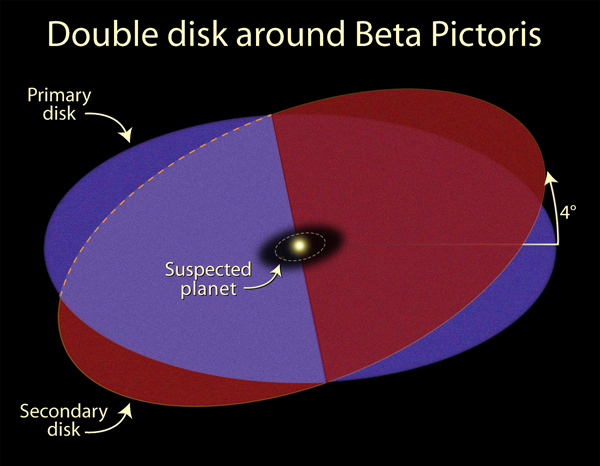

Beta Pictoris - intersecting disks schematic

Detailed images of the nearby star Beta Pictoris, taken by NASA/ESA Hubble Space Telescope, confirm the existence of not one but two dust disks encircling the star. The images offer tantalizing new evidence for at least one Jupiter-size planet orbiting Beta Pictoris.

The finding ends a decade of scientific speculation that an odd warp in the young star's debris disk may actually be another inclined disk. The recent Hubble Advanced Camera for Surveys view - the best visible-light image of Beta Pictoris - clearly shows a distinct secondary disk that is tilted by about 4 degrees from the main disk. The secondary disk is visible out to roughly 24 billion miles(almost 40 billion kilometres) from the star, and probably extends even farther, said astronomers. This Hubble image of Beta Pictoris clearly shows a primary dust disk and a much fainter secondary dust disk. Astronomers used the Advanced Camera's coronagraph to block out the light from the bright star.

Credit: NASA, ESA, and A. Feild (STScI)